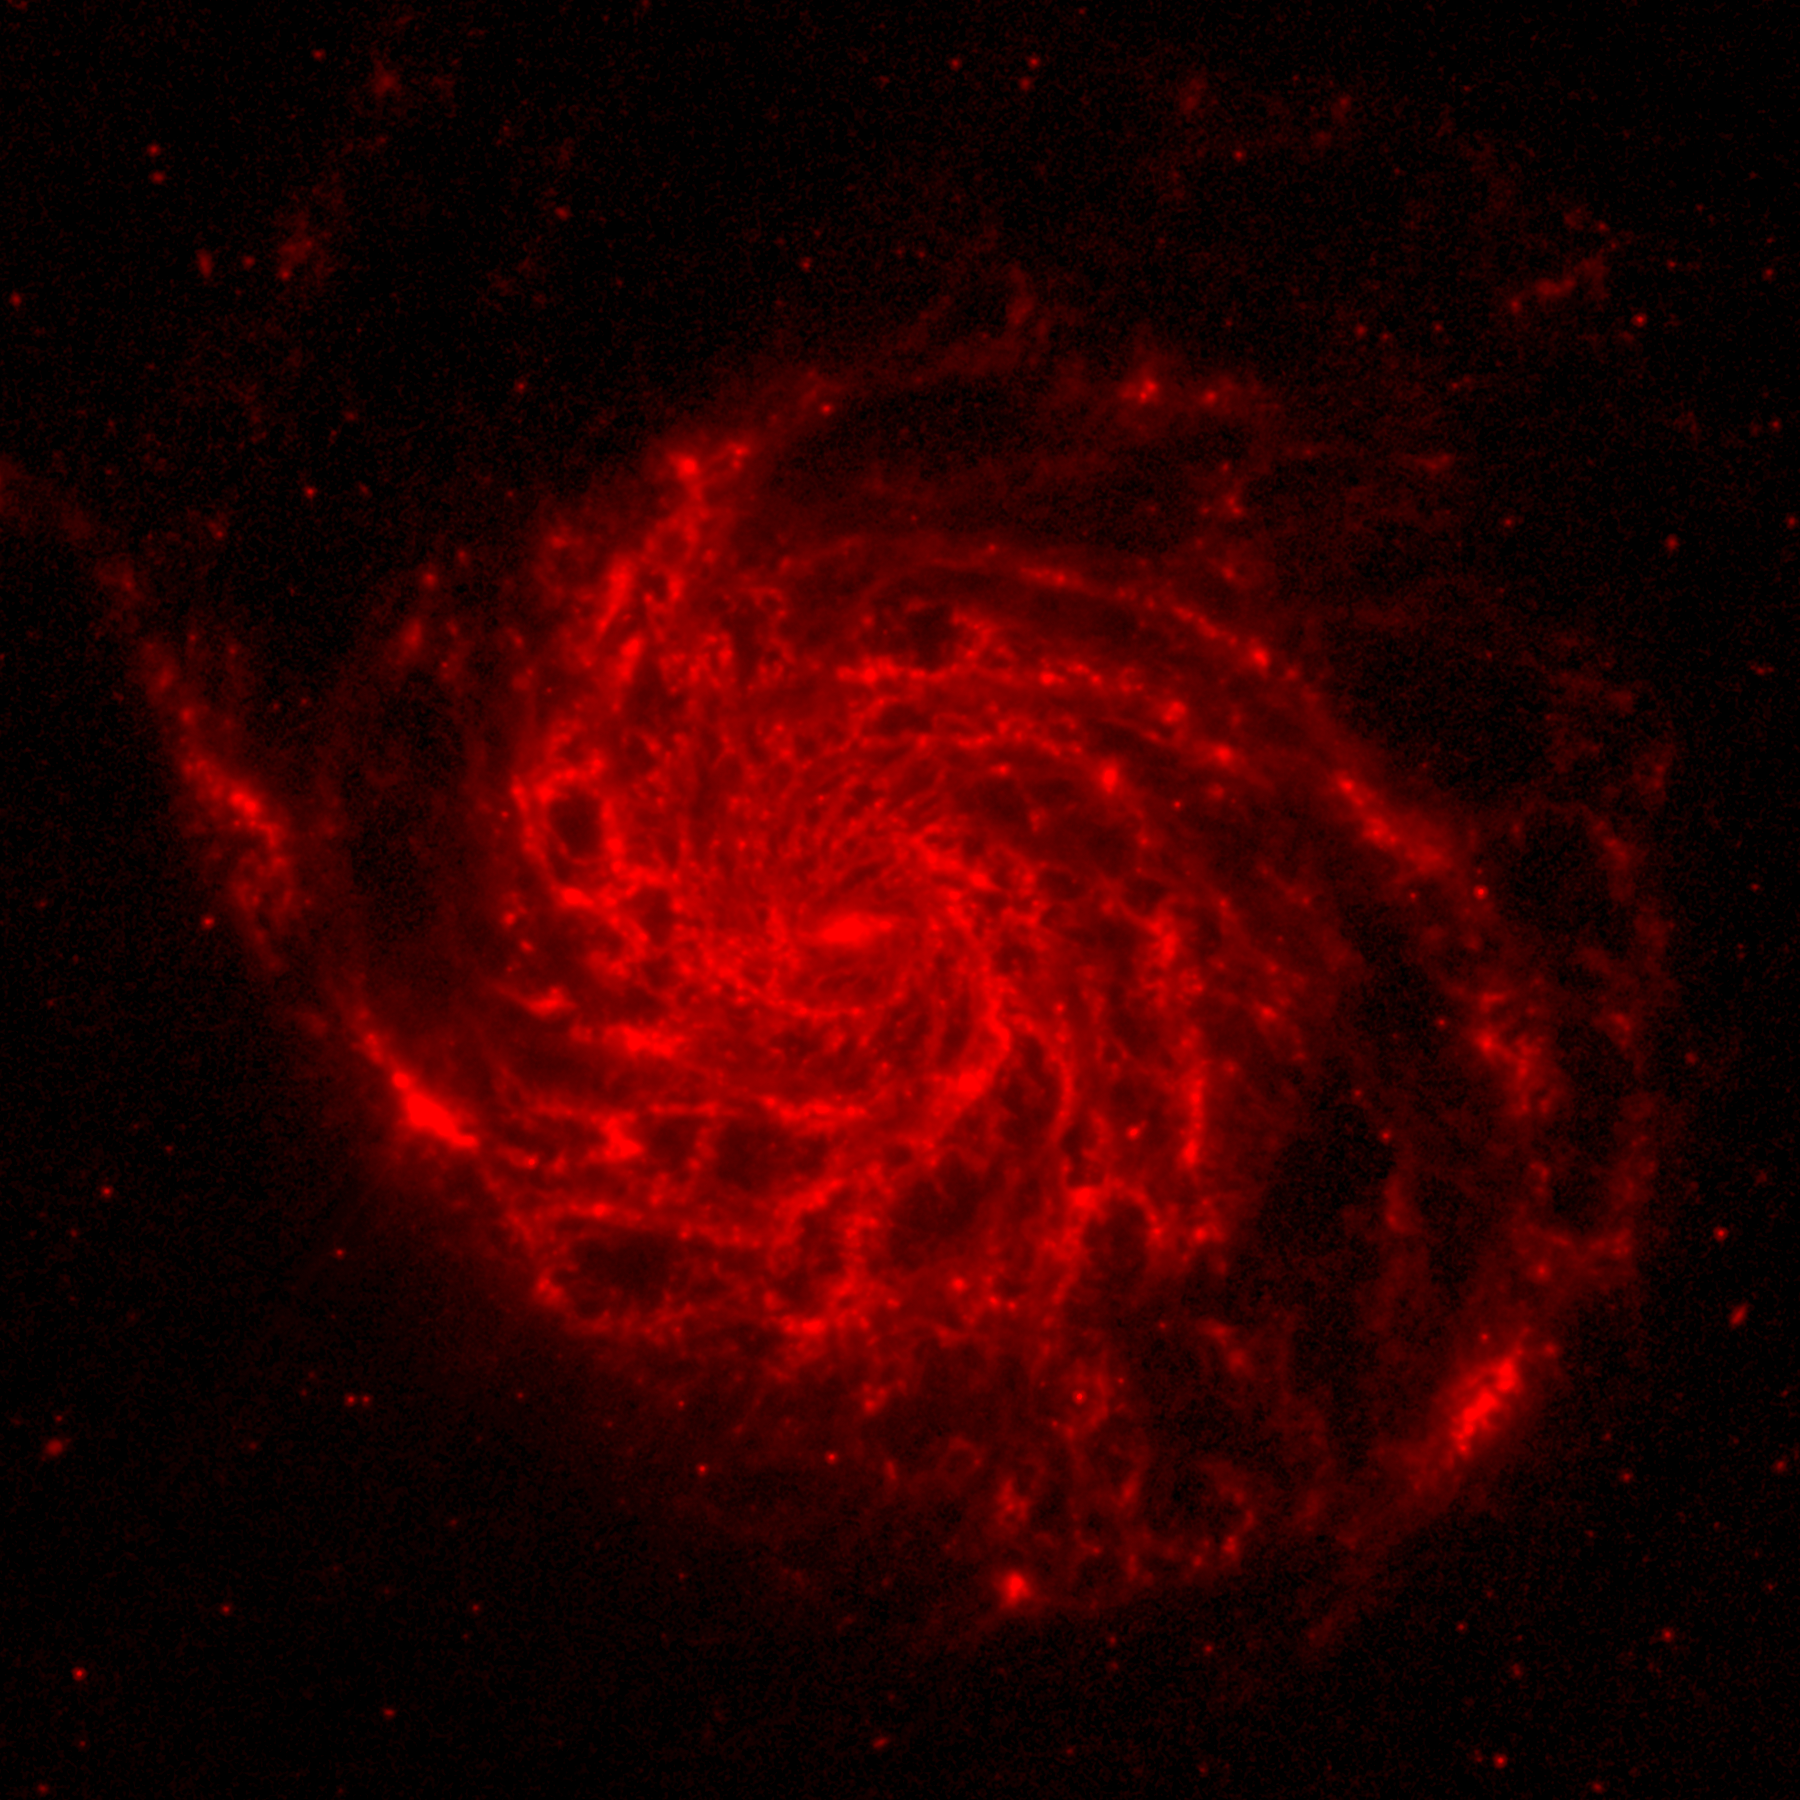

M101 composite image: Spitzer data (red component)

The red colour is Spitzer's view in infared light. Most of this light comes the galaxy's delicate dust lanes. Such dense dust clouds are where new stars can form. In this image, dust warmed by the light of hot, young stars glows red. Astronomers can use infrared light to examine the dust clouds where stars are born

Credit: NASA, ESA, CXC, SSC and STScI